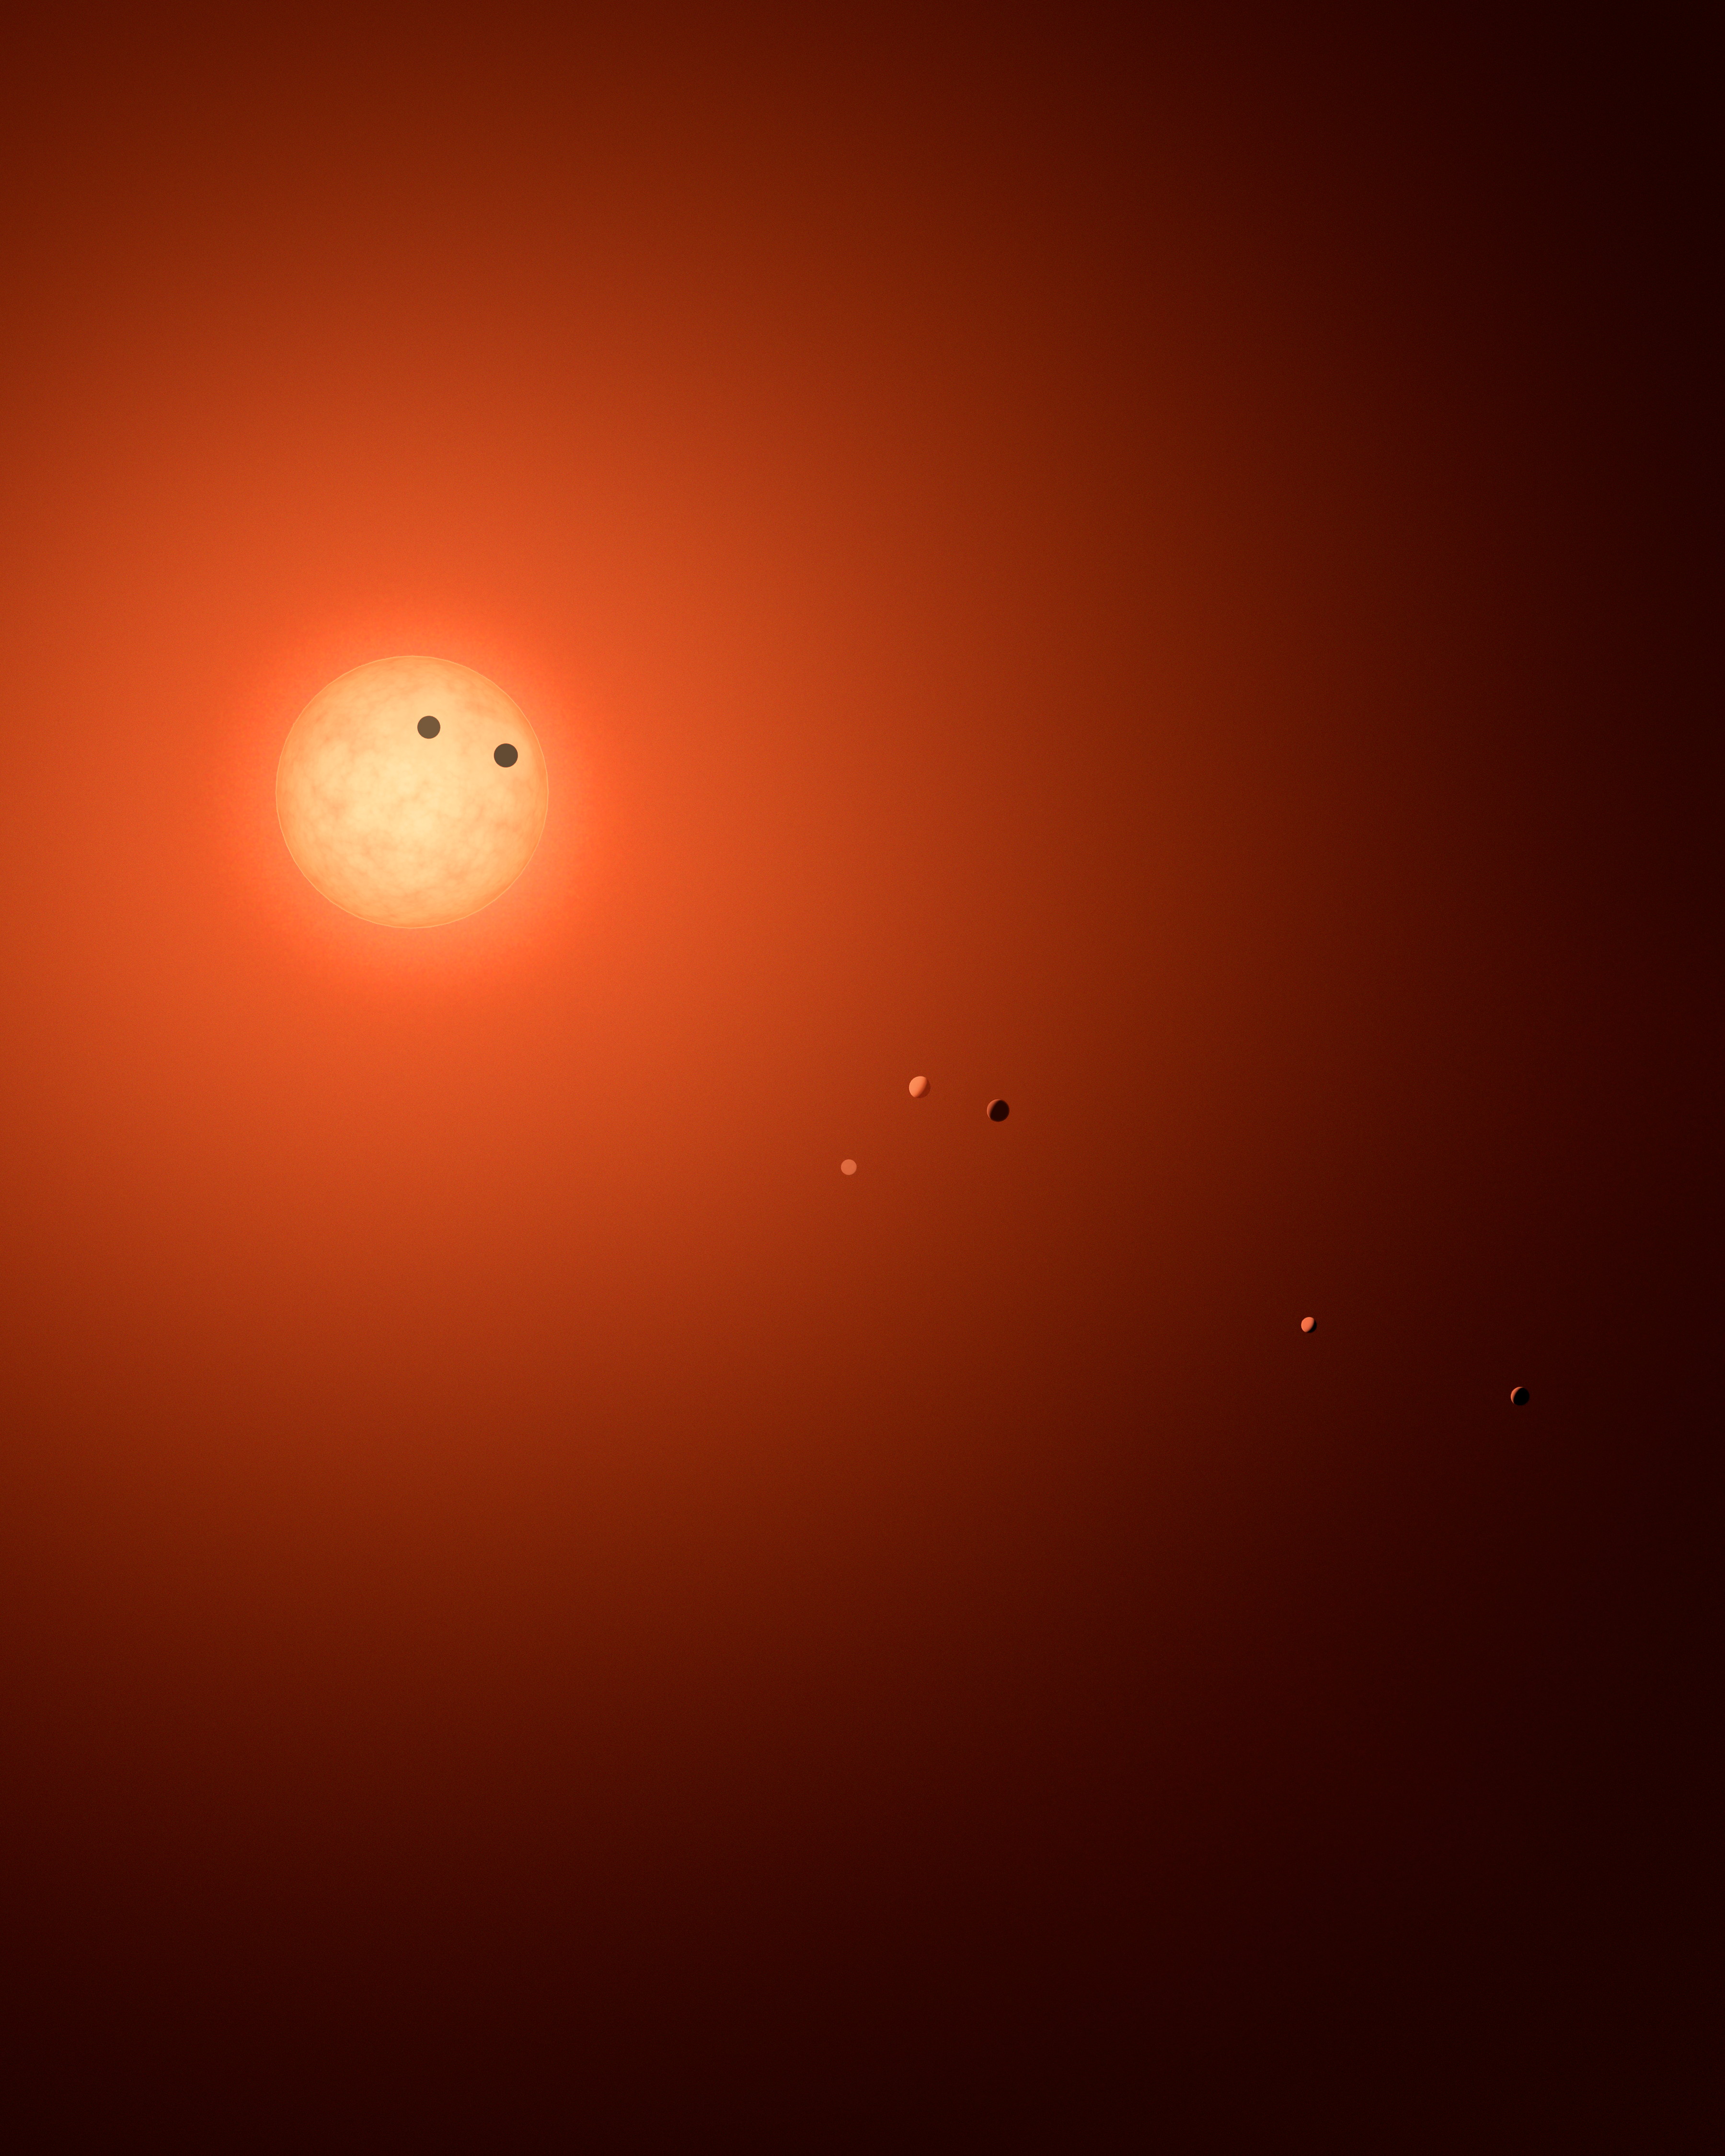

Seven planets orbiting the ultracool dwarf star TRAPPIST-1

This is an artist’s impression of the TRAPPIST-1 system, showcasing all seven planets in various phases. When a planet transits across the disk of the red dwarf host star, as two of the planets here are shown to do, it creates a dip in the star’s light that can be detected from Earth.

Also during such transits astronomers are able to study the potential atmospheres of these planets.

Credit: NASA